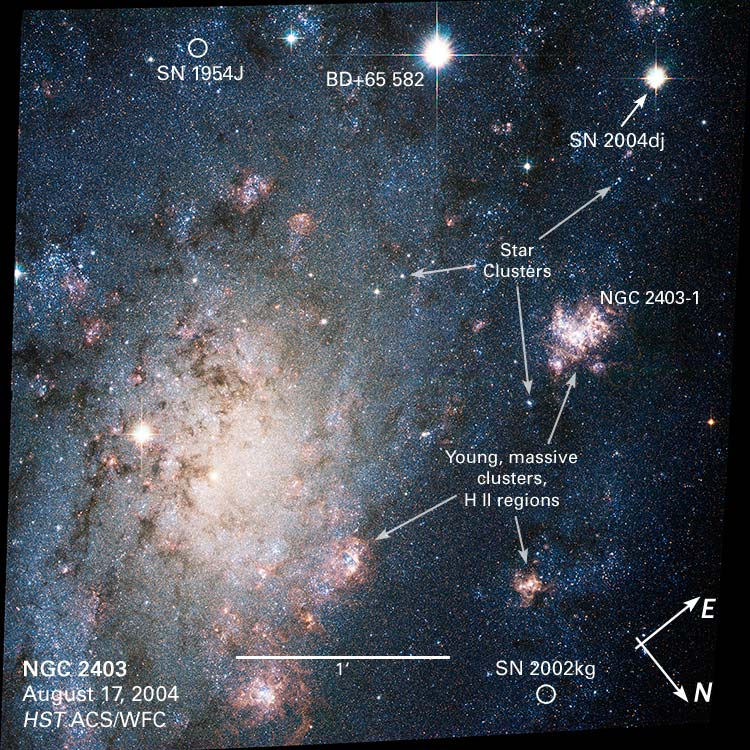

NGC 2403: Annotated Hubble View

This detailed view of spiral galaxy NGC 2403 shows the location of Supernova 2004dj, numerous star clusters, and several other stars that exploded in previous years. The region was observed with the Hubble Space Telescope's Advanced Camera for Surveys on Aug. 17, 2004

Credit: NASA, ESA, A.V. Filippenko (University of California, Berkeley) and Z. Levay (STScI)